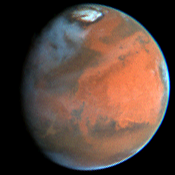

Decay of a Martian Dust Storm

This image was taken on June 27, 1997. When compared to a similar image taken on July 9, 1997 one can see that major changes takes place in the Martian atmosphere.

Credit: Steve Lee (Univ. Colorado), Phil James (Univ. Toledo), and Mike Wolff (Univ. Toledo), and NASA/ESA